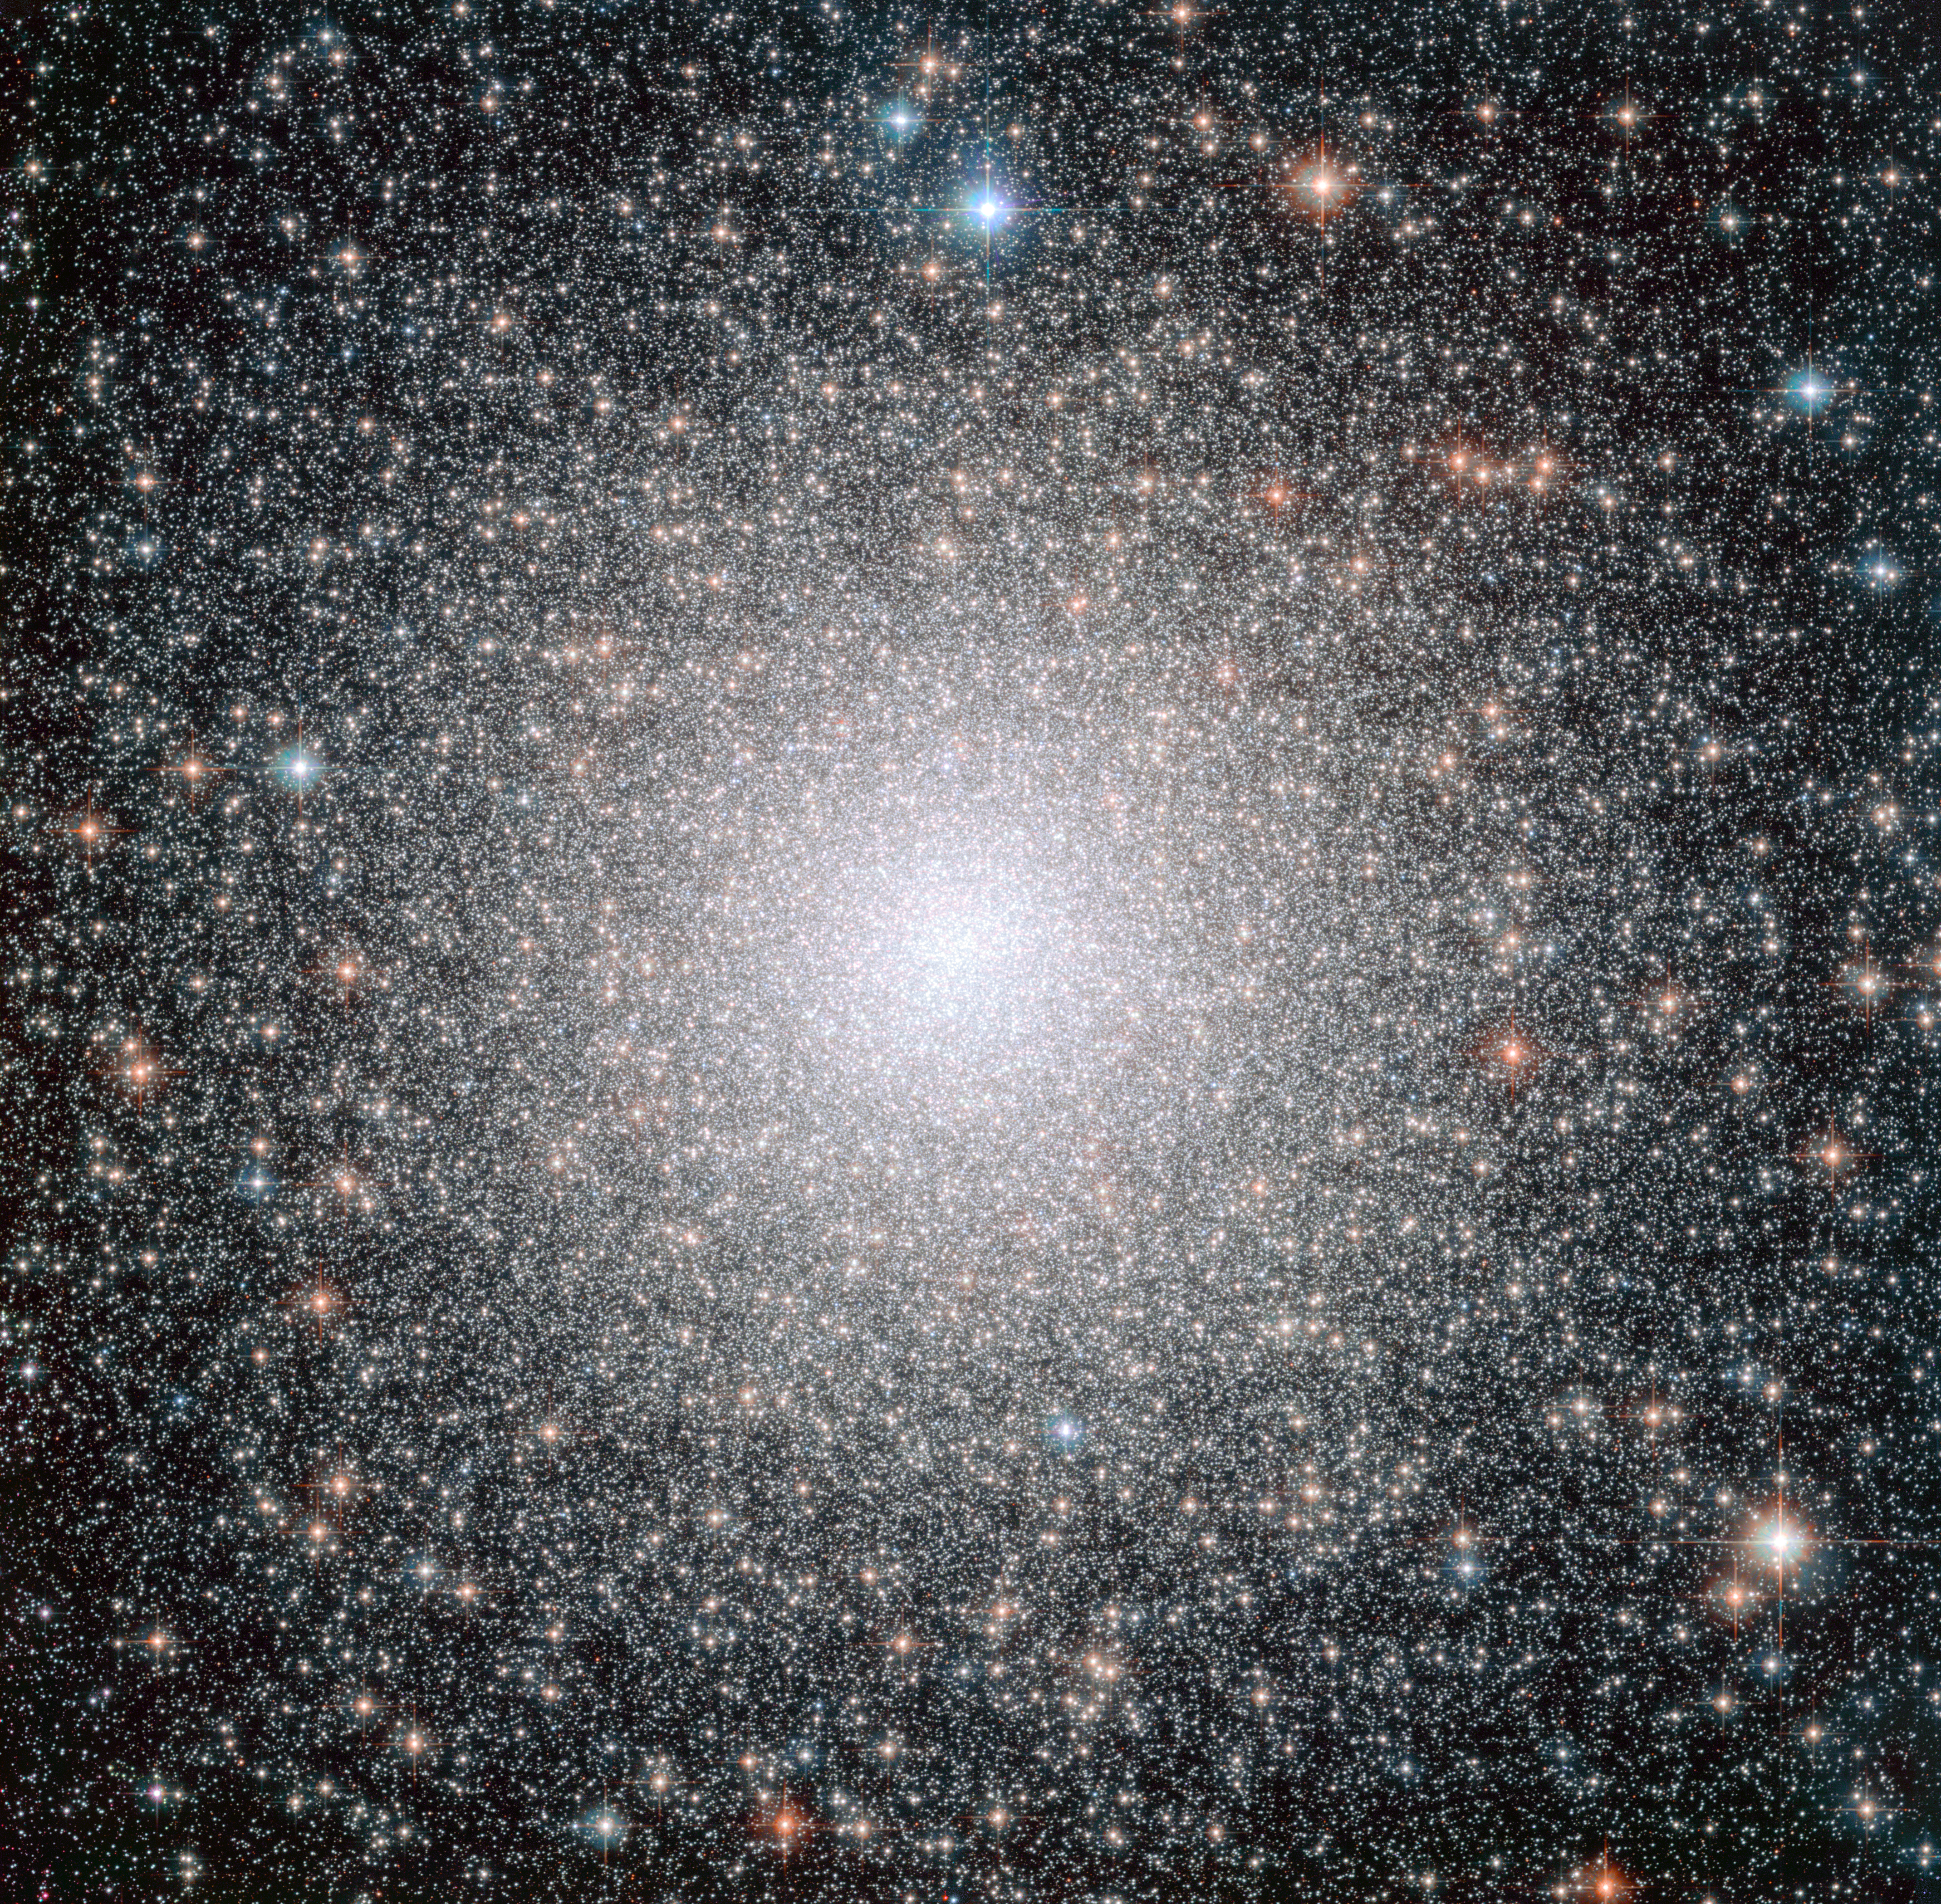

The globular cluster NGC 6388, observed by Hubble

This image from the NASA/ESA Hubble Space Telescope shows NGC 6388, a dynamically middle-aged globular cluster in the Milky Way. While the cluster formed in the distant past (like all globular clusters, it is over ten billion years old), a study of the distribution of bright blue stars within the cluster shows that it has aged at a moderate speed, and its heaviest stars are in the process of migrating to the centre.

A new study using Hubble data has discovered that globular clusters of the same age can have dramatically different distributions of blue straggler stars within them, suggesting that clusters can age at substantially different rates.

Credit: NASA, ESA, F. Ferraro (University of Bologna)